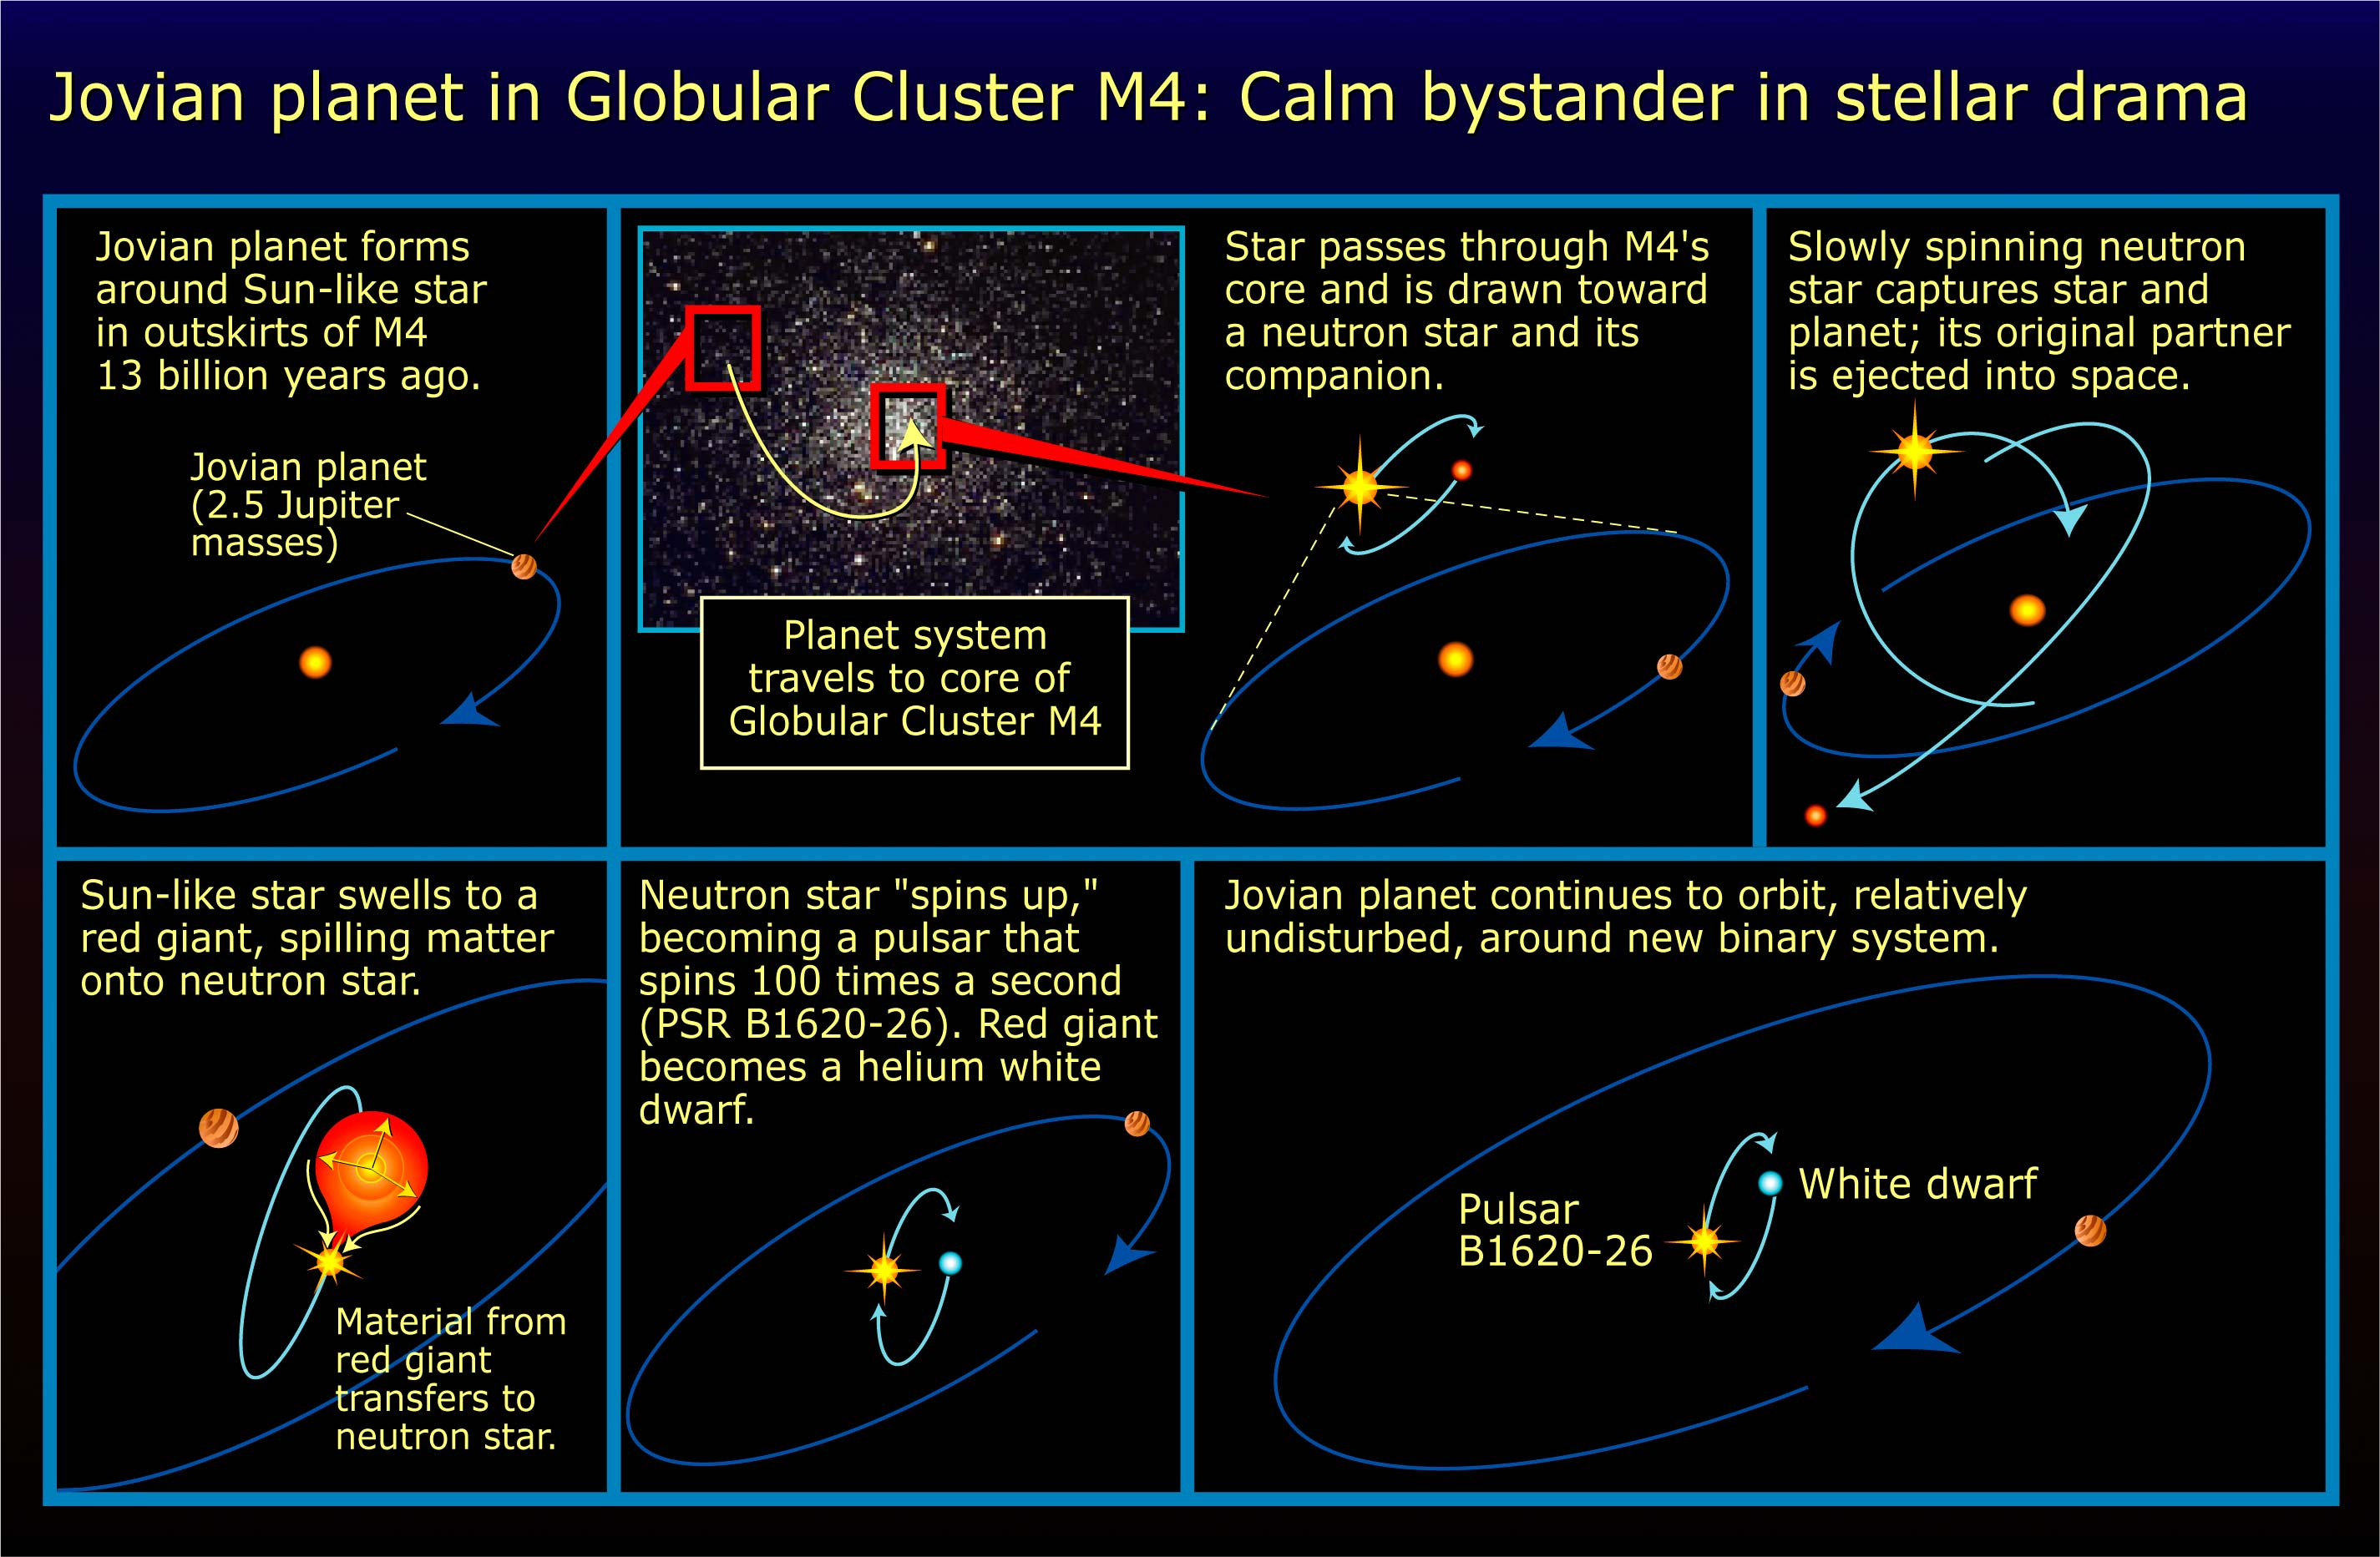

Jovian planet in globular cluster M4: calm bystander in stellar drama

Long before our Sun and Earth existed, or even the Milky Way galaxy, as we know it today, a planet formed around a sun-like star in one of the earliest homesteaders of our corner of the universe, a globular star cluster.

This planet, a few times more massive than Jupiter has survived the harsh conditions of a globular cluster, a gravitational collision with a binary system, and the death of its progenitor star.

Credit: NASA/ESA and A. Feild (STScI)